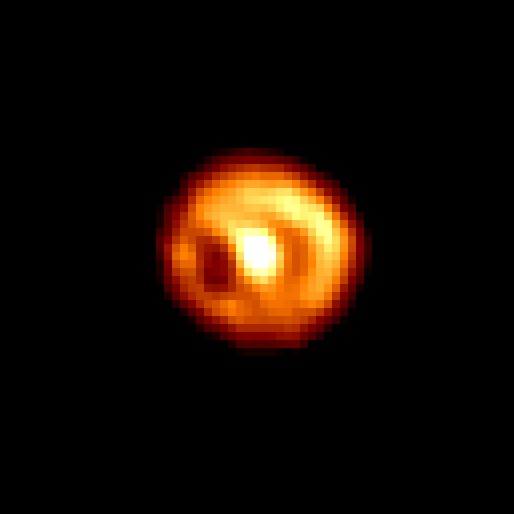

Nova Cygni 1992

An HST image taken on May 31 1993, 467 days after the explosion, provided the first glimpse of the ring and a mysterious bar-like structure. But the image interpretation was severely hampered by HST's optical aberration, that scattered light from the central star which contaminated the ring's image.

Credit: F. Paresce, R. Jedrzejewski (STScI) NASA/ESA